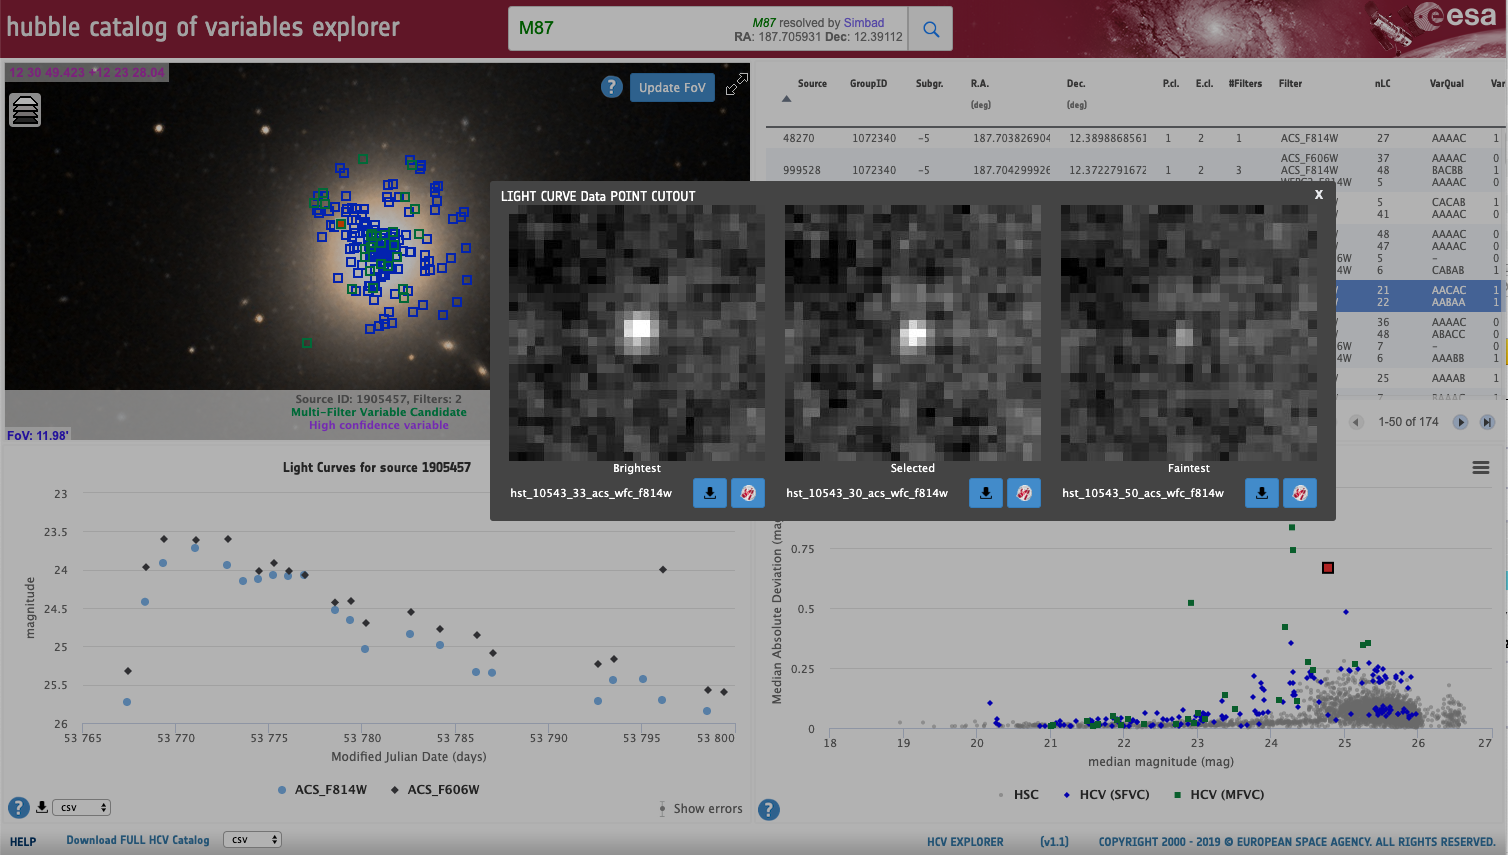

Screenshot of the Hubble Catalog of Variables Tool

Screenshot of the Hubble Catalog of Variables Tool that showcases the larger Hubble Legacy Archive (HLA) cutouts for each light curve data point, with access to the Space Telescope Science Institute (STScI) cutout service and access to the corresponding HLA observations in the European Hubble Space Telescope Archive (eHST).

Credit: ESA Hubble Catalog of Variables